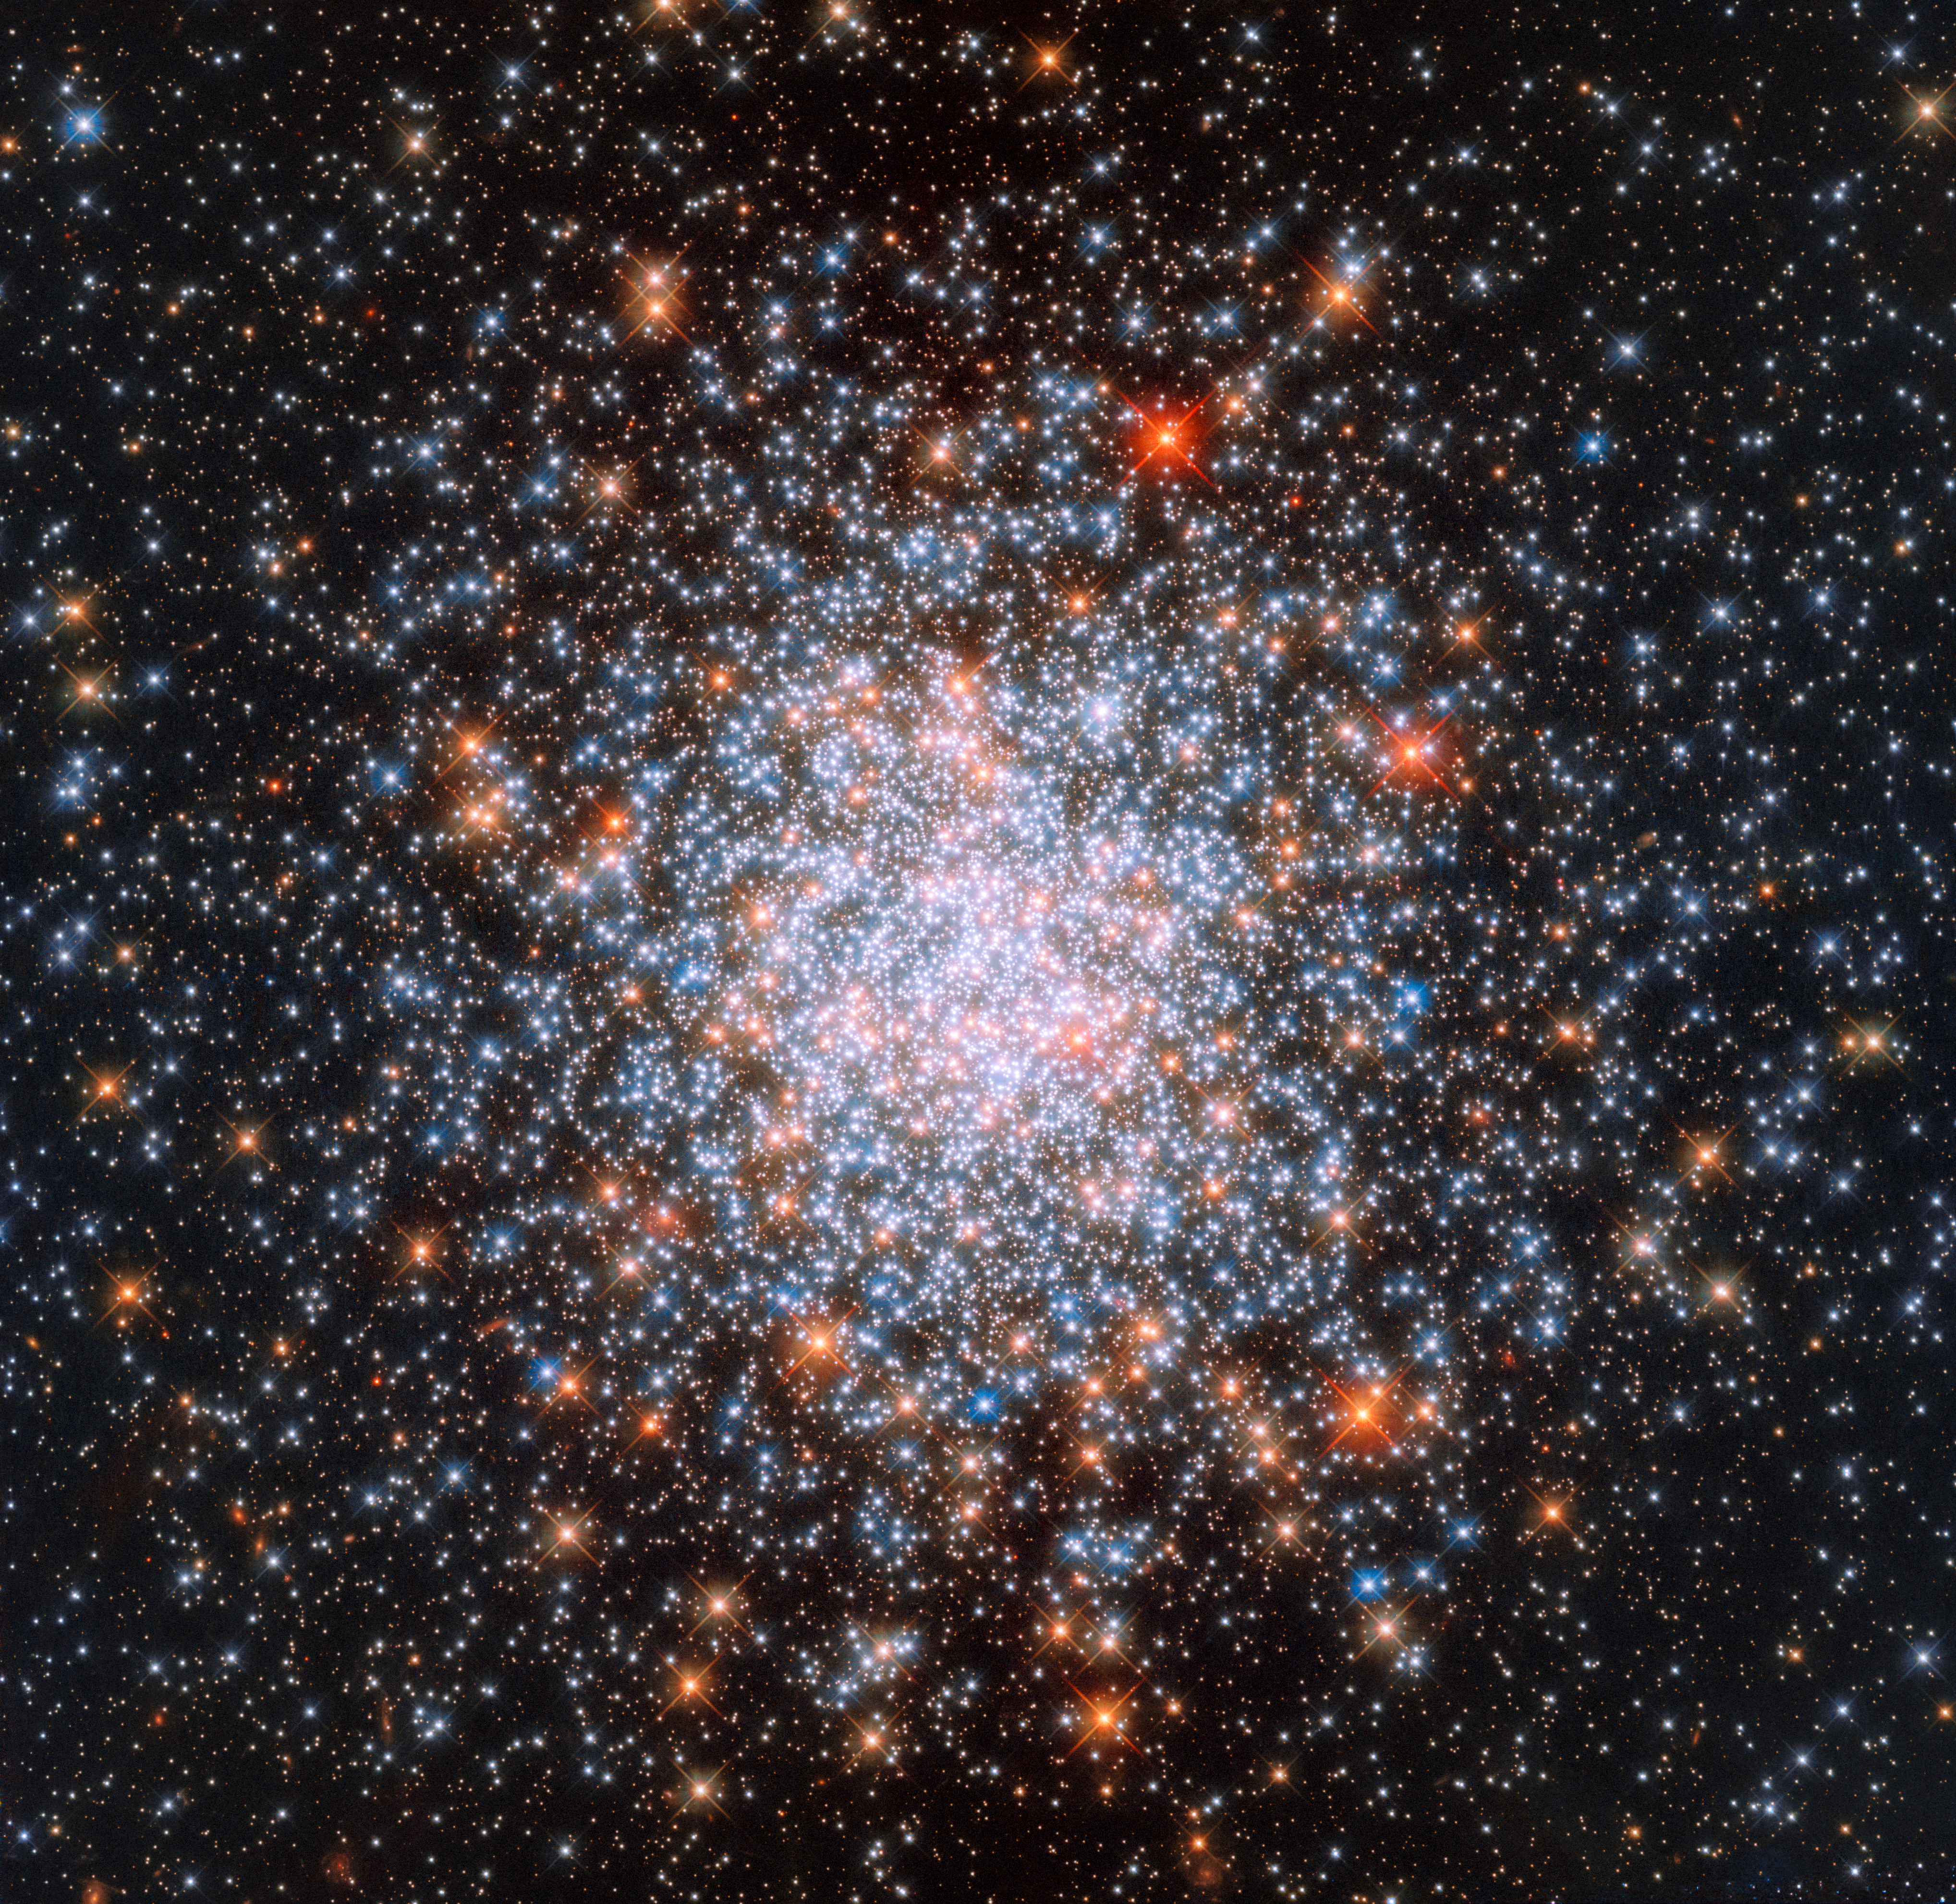

Different generations

Star clusters are common structures throughout the Universe, each made up of hundreds of thousands of stars all bound together by gravity. This star-filled image, taken with the NASA/ESA Hubble Space Telescope’s Wide Field Camera 3 (WFC3), shows one of them: NGC 1866.

NGC 1866 is found at the very edges of the Large Magellanic Cloud, a small galaxy located near to the Milky Way. The cluster was discovered in 1826 by Scottish astronomer James Dunlop, who catalogued thousands of stars and deep-sky objects during his career.

However, NGC 1866 is no ordinary cluster. It is a surprisingly young globular cluster situated close enough to us that its stars can be studied individually — no mean feat given the mammoth distances involved in studying the cosmos! There is still debate over how globular clusters form, but observations such as this have revealed that most of their stars are old and have a low metallicity. In astronomy, ‘metals’ are any elements other than hydrogen and helium; since stars form heavier elements within their core as they carry out nuclear fusion throughout their lifetimes, a low metallicity indicates that a star is very old, as the material from which it formed was not enriched with many heavy elements. It’s possible that the stars within globular clusters are so old that they were actually some of the very first to form after the Big Bang.

In the case of NGC 1866, though, not all stars are the same. Different populations, or generations, of stars are thought to coexist within the cluster. Once the first generation of stars formed, the cluster may have encountered a giant gas cloud that sparked a new wave of star formation and gave rise to a second, younger, generation of stars — explaining why it seems surprisingly youthful.

Credit: ESA/Hubble & NASA